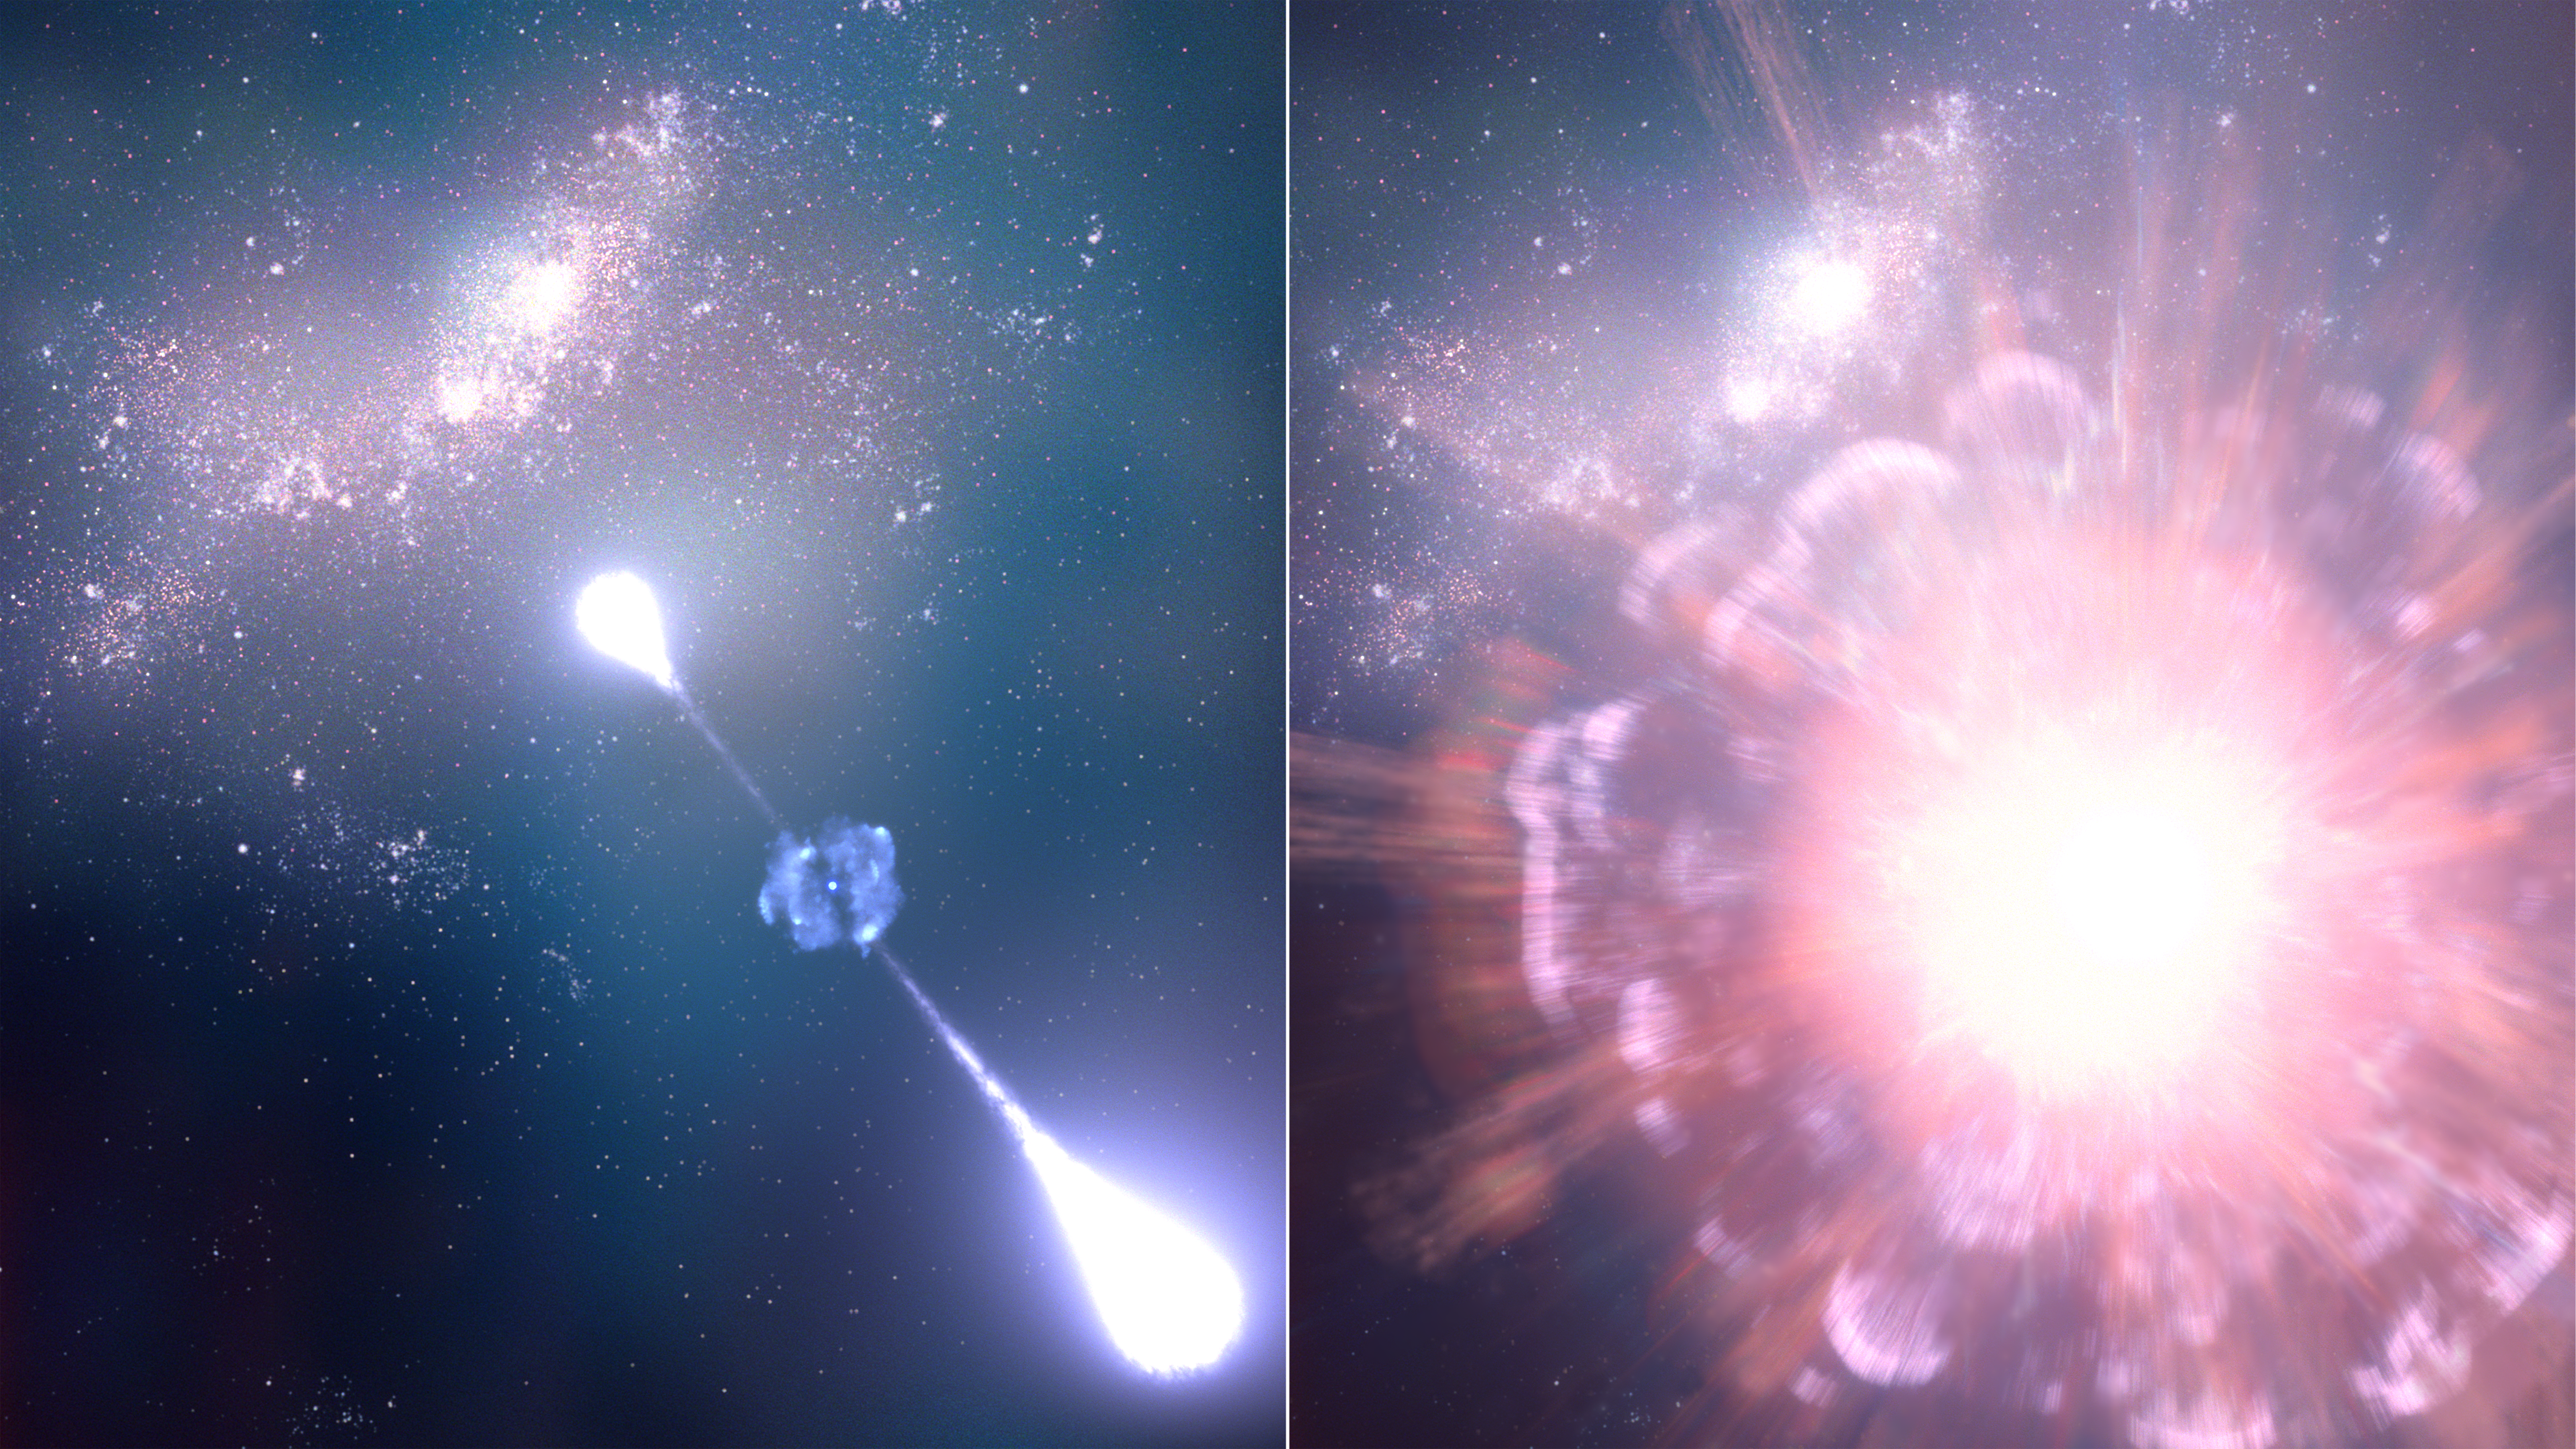

Supernova GRB 250314A (artist's concept)

This two-part illustration represents supernova GRB 250314A as it was exploding and three months after that when Webb observed it. Webb confirmed the supernova occurred when the universe was only 730 million years old.

On the left, the characteristic jets of a gamma-ray burst can be seen punching through material that was ejected by the supernova explosion.

On the right, the glowing supernova shines through gas continuing to rush outward from the blast.

In the background, the supernova’s host galaxy contains numerous bright star-forming regions.

Credit: NASA, ESA, CSA, STScI, L. Hustak (STScI)